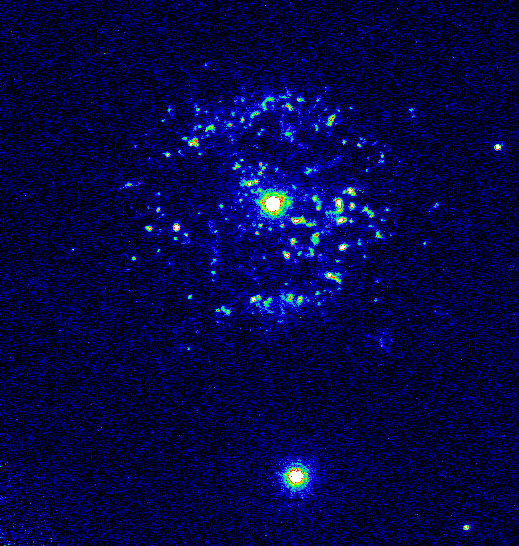

Recurring Nova T Pyxidis

Closer inspection by the Hubble Space Telescope, however, reveals that the shells are not smooth at all. In fact, this high-resolution image shows that the shells are actually more than 2, 000 gaseous blobs packed into an area that is 1 light-year across. Resembling shrapnel from a shotgun blast, the blobs may have been produced by the nova explosion, the subsequent expansion of gaseous debris, or collisions between fast-moving and slow- moving gas from several eruptions. False colour has been applied to this image to enhance details in the blobs.

Credit: Mike Shara, Bob Williams, and David Zurek ( Space Telescope Science Institute); Roberto Gilmozzi (European Southern Observatory); Dina Prialnik (Tel Aviv University); and NASA/ESA